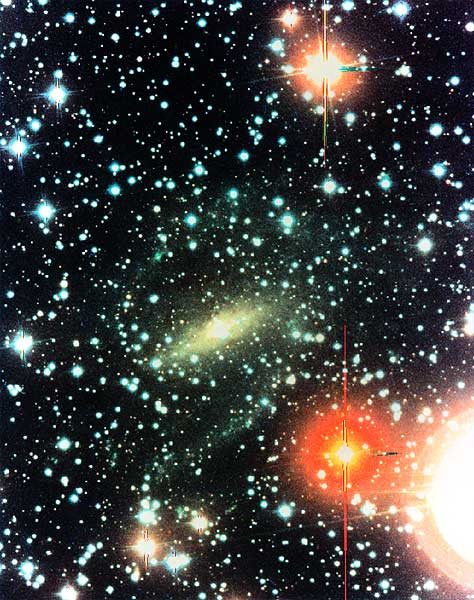

Astronomers Discover Nearby Spiral Galaxy Hidden Behind the Milky Way

This visual light image of a newly discovered galaxy called "Dwingeloo 1," was taken with the Isaac Newton Telescope on La Palma in the Canary Islands (Administered by the Royal Greenwich Observatory, United Kingdom).

Though only ten million light-years away (or five times the distance of the Andromeda galaxy - closest city of stars to our Milky Way Galaxy), this newly discovered collection of more than 100 billion stars has gone undetected previously because it is hidden from view behind our Milky Way galaxy. It probably belongs to a nearby group of galaxies that include two named Maffei 1 and 2.

Credit: Dwingeloo Obscured Galaxy Survey team, S. Hughes, & S. Maddox/Isaac Newton telescope (RGO)